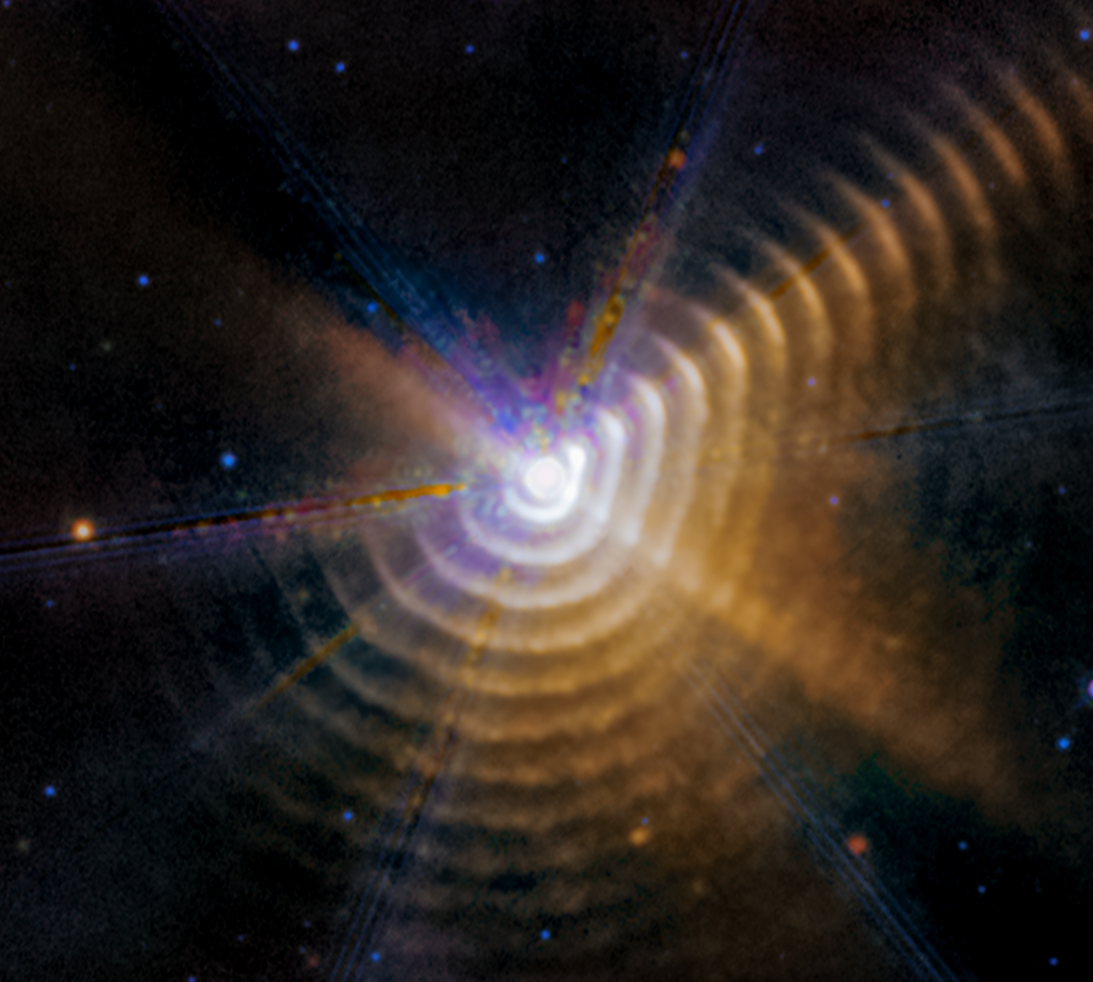

Wolf-Rayet 140 (MIRI image) - September 2023

Astronomers using the NASA/ESA/CSA James Webb Space Telescope James Webb Space Telescope have identified two stars responsible for generating carbon-rich dust a mere 5000 light-years away in our own Milky Way galaxy. As the massive stars in Wolf-Rayet 140 swing past one another on their elongated orbits, their winds collide and produce the carbon-rich dust. For a few months every eight years, the stars form a new shell of dust that expands outward — and may eventually go on to become part of stars that form elsewhere in our galaxy.

Every shell is racing away from the stars at more than 2600 kilometers per second, almost 1% the speed of light.

Wolf-Rayet 140 lies just over 5000 light-years away in our Milky Way galaxy.

Credit: NASA, ESA, CSA, STScI, E. Lieb (University of Denver), R. Lau (NSF NOIRLab), J. Hoffman (University of Denver)